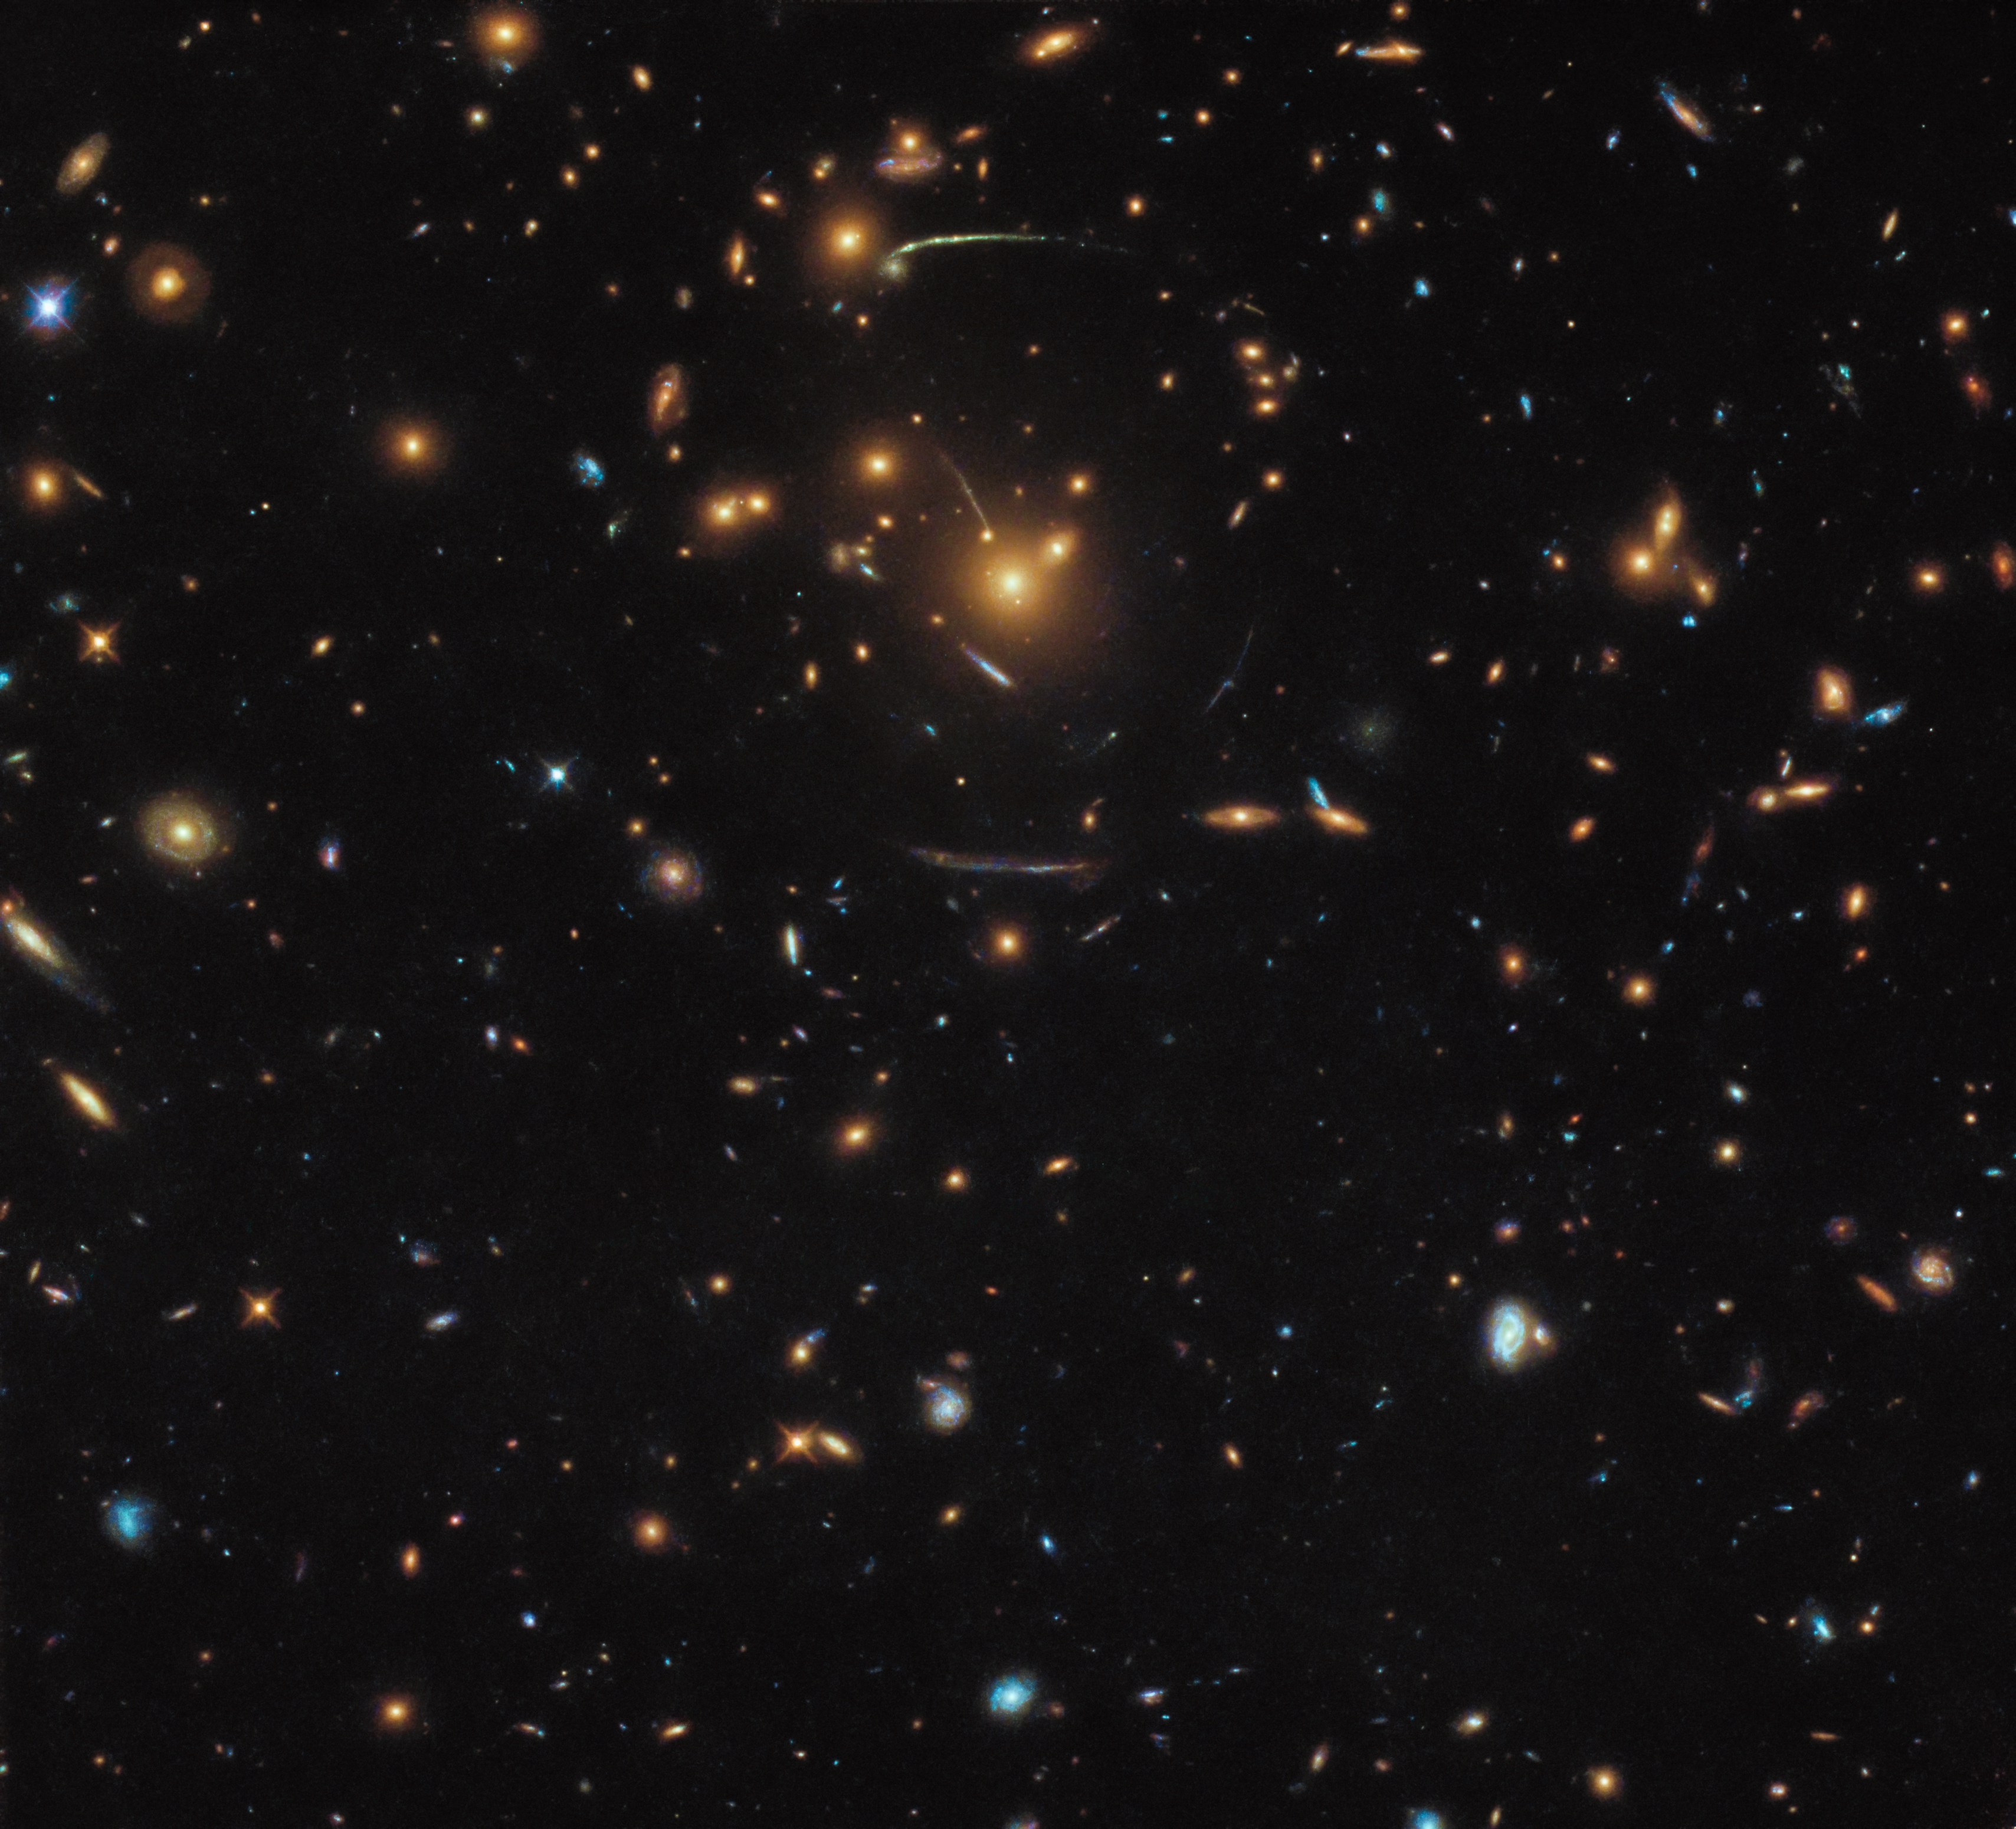

Warped and distorted

This NASA/ESA Hubble Space Telescope image contains a veritable mix of different galaxies, some of which belong to the same larger structure: At the middle of the frame sits the galaxy cluster SDSS J1050+0017.

The gigantic mass of this cluster creates the fascinating phenomenon of strong ravitational lensing. The gravity of the cluster bends light coming from behind it in a similar way to how the base of a wine glass bends light. The effects of this lensing can be clearly seen as curved streaks forming a circular shape around the centre of the frame. Astronomers can use these distorted galaxies to calculate the mass of the cluster — including the mass of the dark matter within it — and to peer deeper into the Universe as otherwise possible. Gravitational lensing does not only distorts the views of galaxies, it also enlarge their appearance on the sky and magnifies their light.

Hubble has viewed gravitational lensing many times, and produced truly stunning images. Astronomers even set up a dedicated programme to study different galaxy clusters which show a great number of lensed galaxies: The Frontier Fields programme. This way some of the most distant galaxies in the Universe were found. With each additional cluster being observed some more distant galaxies are added to this list, slowly completing our picture of how galaxies looked and evolved in the early Universe.

Credit: ESA/Hubble & NASA Acknowledgement: Judy Schmidt